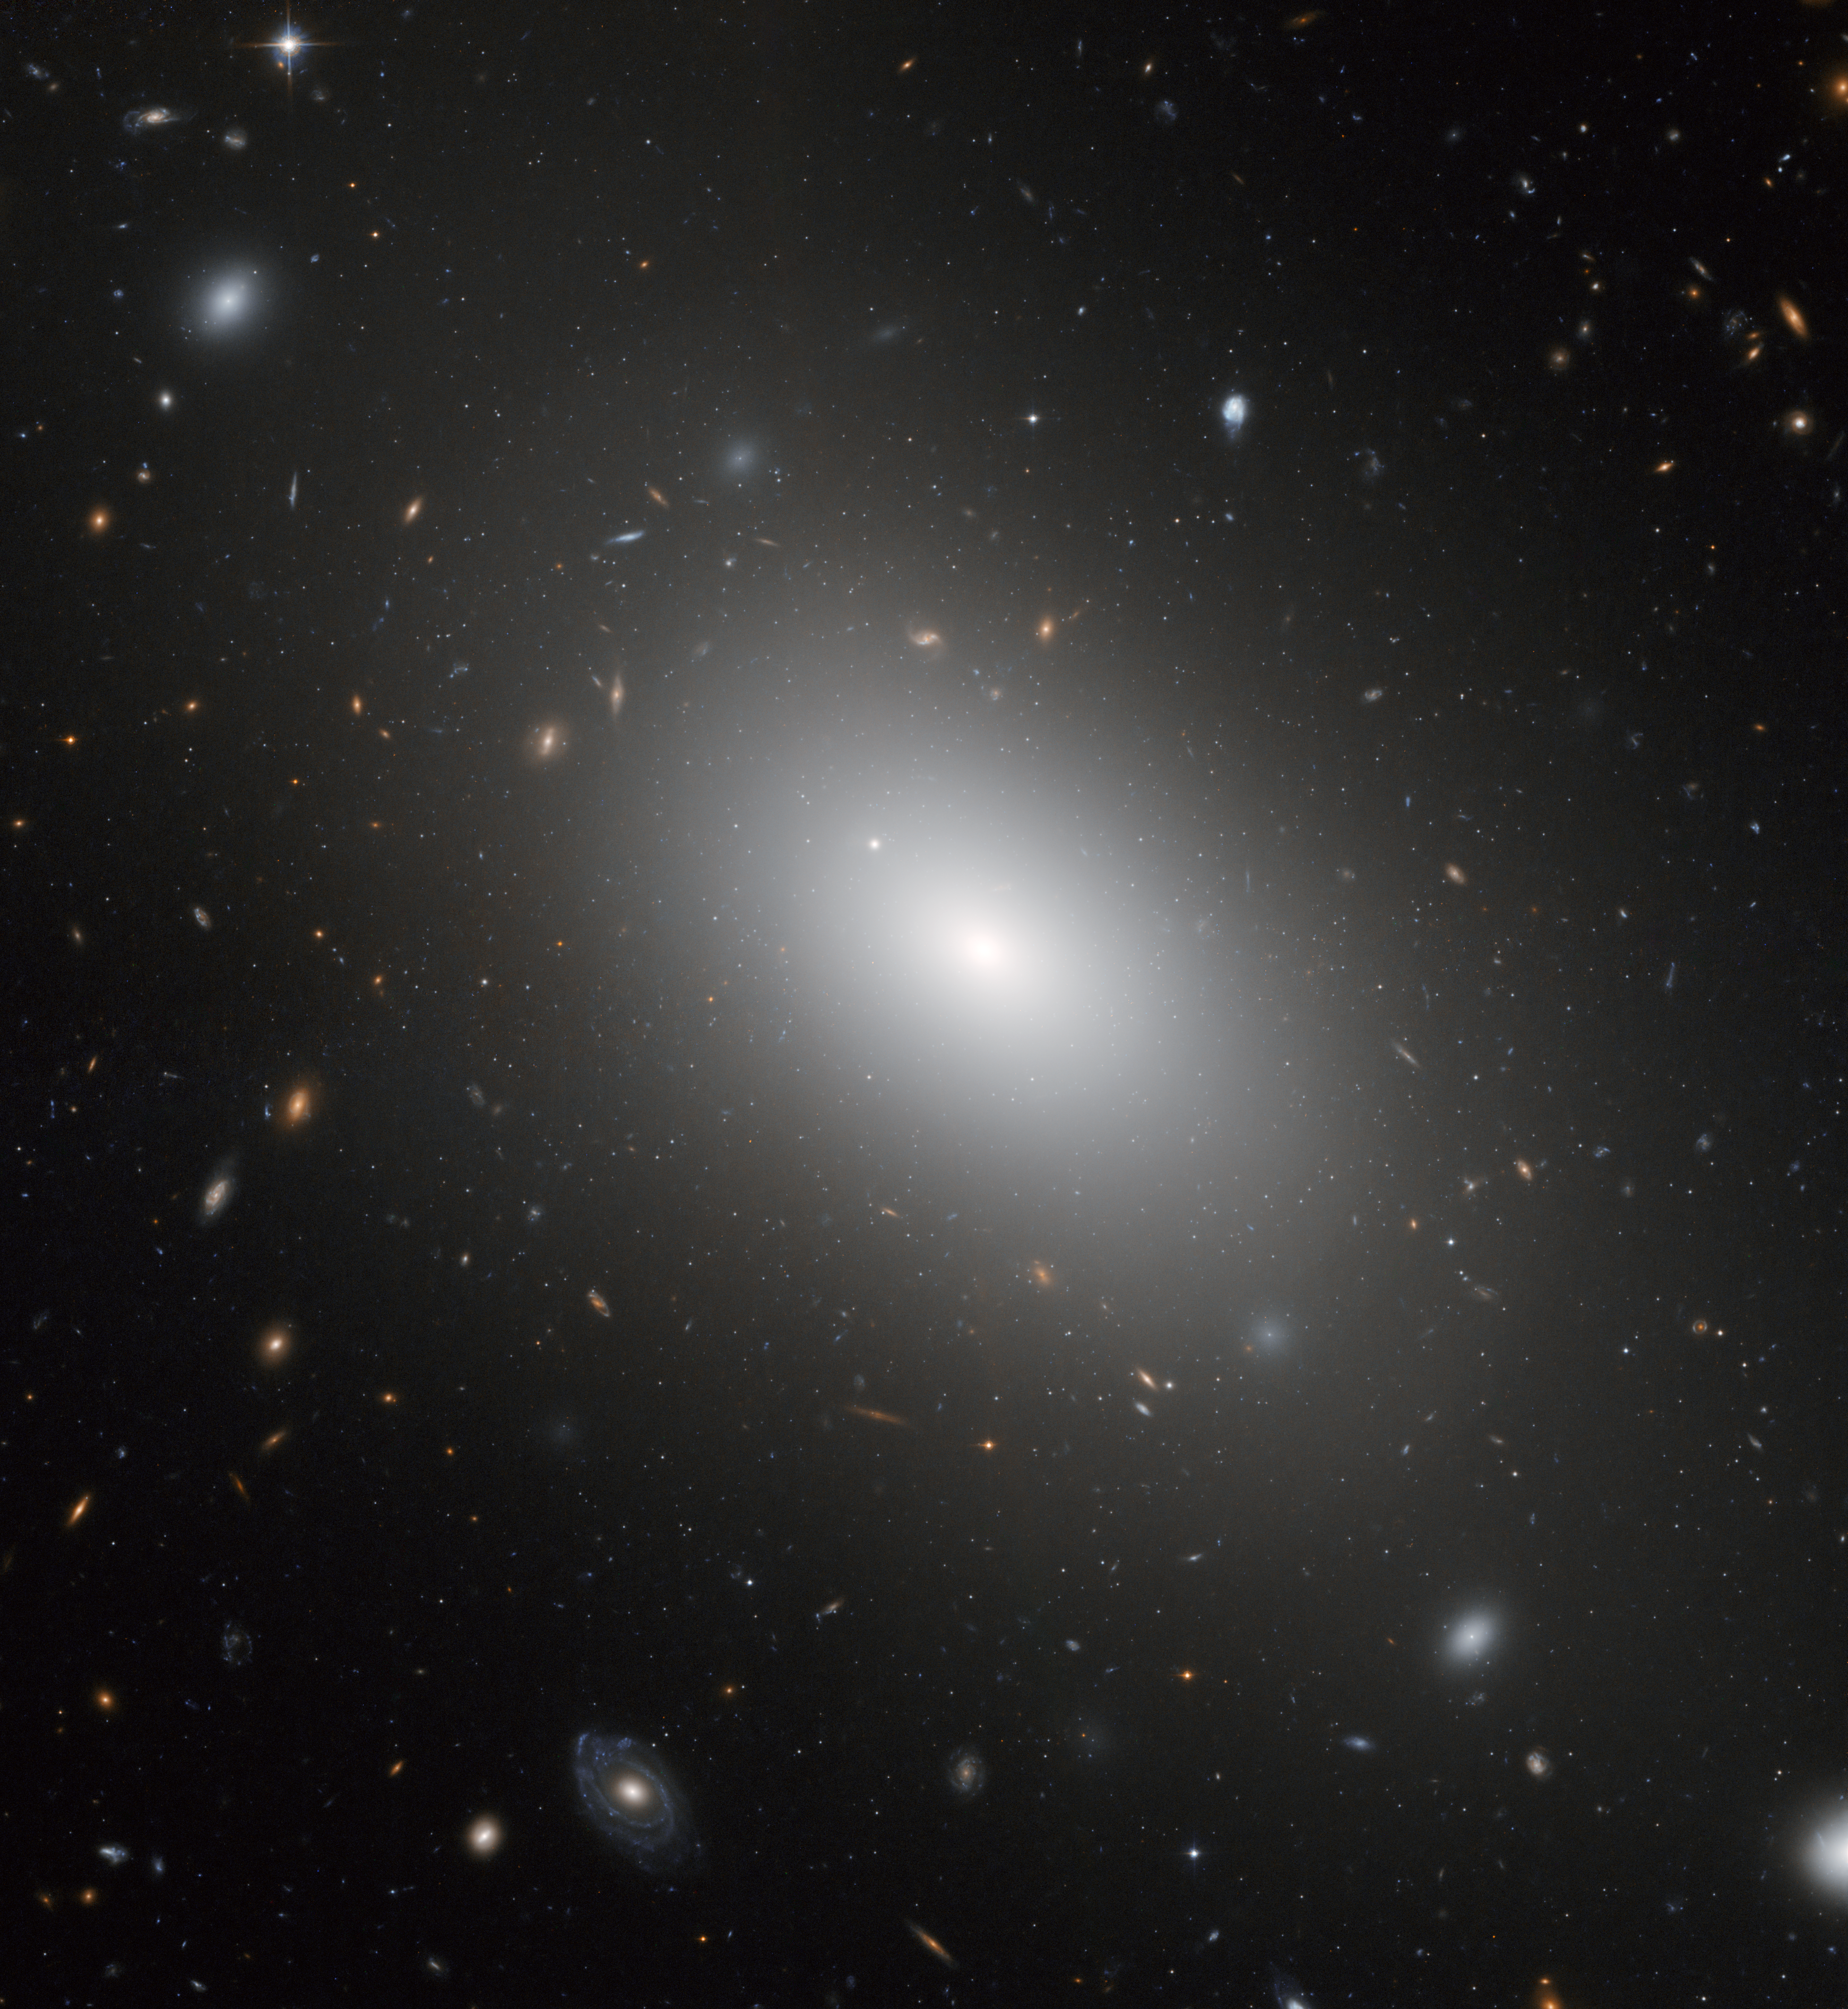

The gargantuan galaxy NGC 1132

The NASA/ESA Hubble Space Telescope has captured a new image of the galaxy NGC 1132 which is, most likely, a cosmic fossil - the aftermath of an enormous multi-galactic pile-up, where the carnage of collision after collision has built up a brilliant but fuzzy giant elliptical galaxy far outshining typical galaxies.

NGC 1132, together with the small dwarf galaxies surrounding it, are dubbed a "fossil group" as they are most likely the remains of a group of galaxies that merged together in the recent past.

In this Hubble image, NGC 1132 is seen surrounded by thousands of ancient globular clusters, swarming around the galaxy like bees around a hive. These globular clusters are likely to be the survivors of the disruption of their cannibalised parent galaxies that have been eaten by NGC 1132 and may reveal its merger history. In the background, there is a stunning tapestry of numerous galaxies that are much further away.

Credit: NASA, ESA and the Hubble Heritage (STScI/AURA)-ESA/Hubble Collaboration. Acknowledgment: M. West (ESO, Chile)